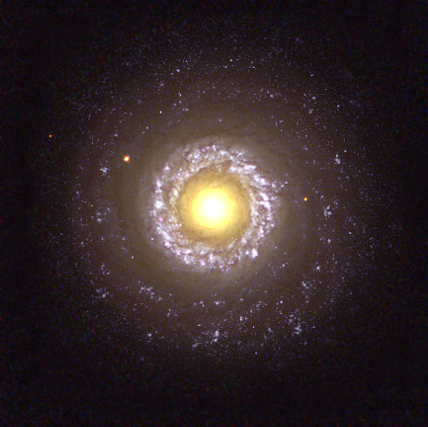

Sunny side up

What may first appear as a sunny side up egg is actually NASA/ESA Hubble Space Telescope's face-on snapshot of the small spiral galaxy NGC 7742. But NGC 7742 is not a run-of-the-mill spiral galaxy. In fact, this spiral is known to be a Seyfert 2 active galaxy, a type of galaxy that is probably powered by a black hole residing in its core.

The core of NGC 7742 is the large yellow 'yolk' in the centreof the image. The lumpy, thick ring around this core is an area of active starbirth. The ring is about 3,000 light-years from the core. Tightly wound spiral arms also are faintly visible. Surrounding the inner ring is a wispy band of material, which is probably the remains of a once very active stellar breeding ground.

Credit: Hubble Heritage Team (AURA/STScI/NASA/ESA)